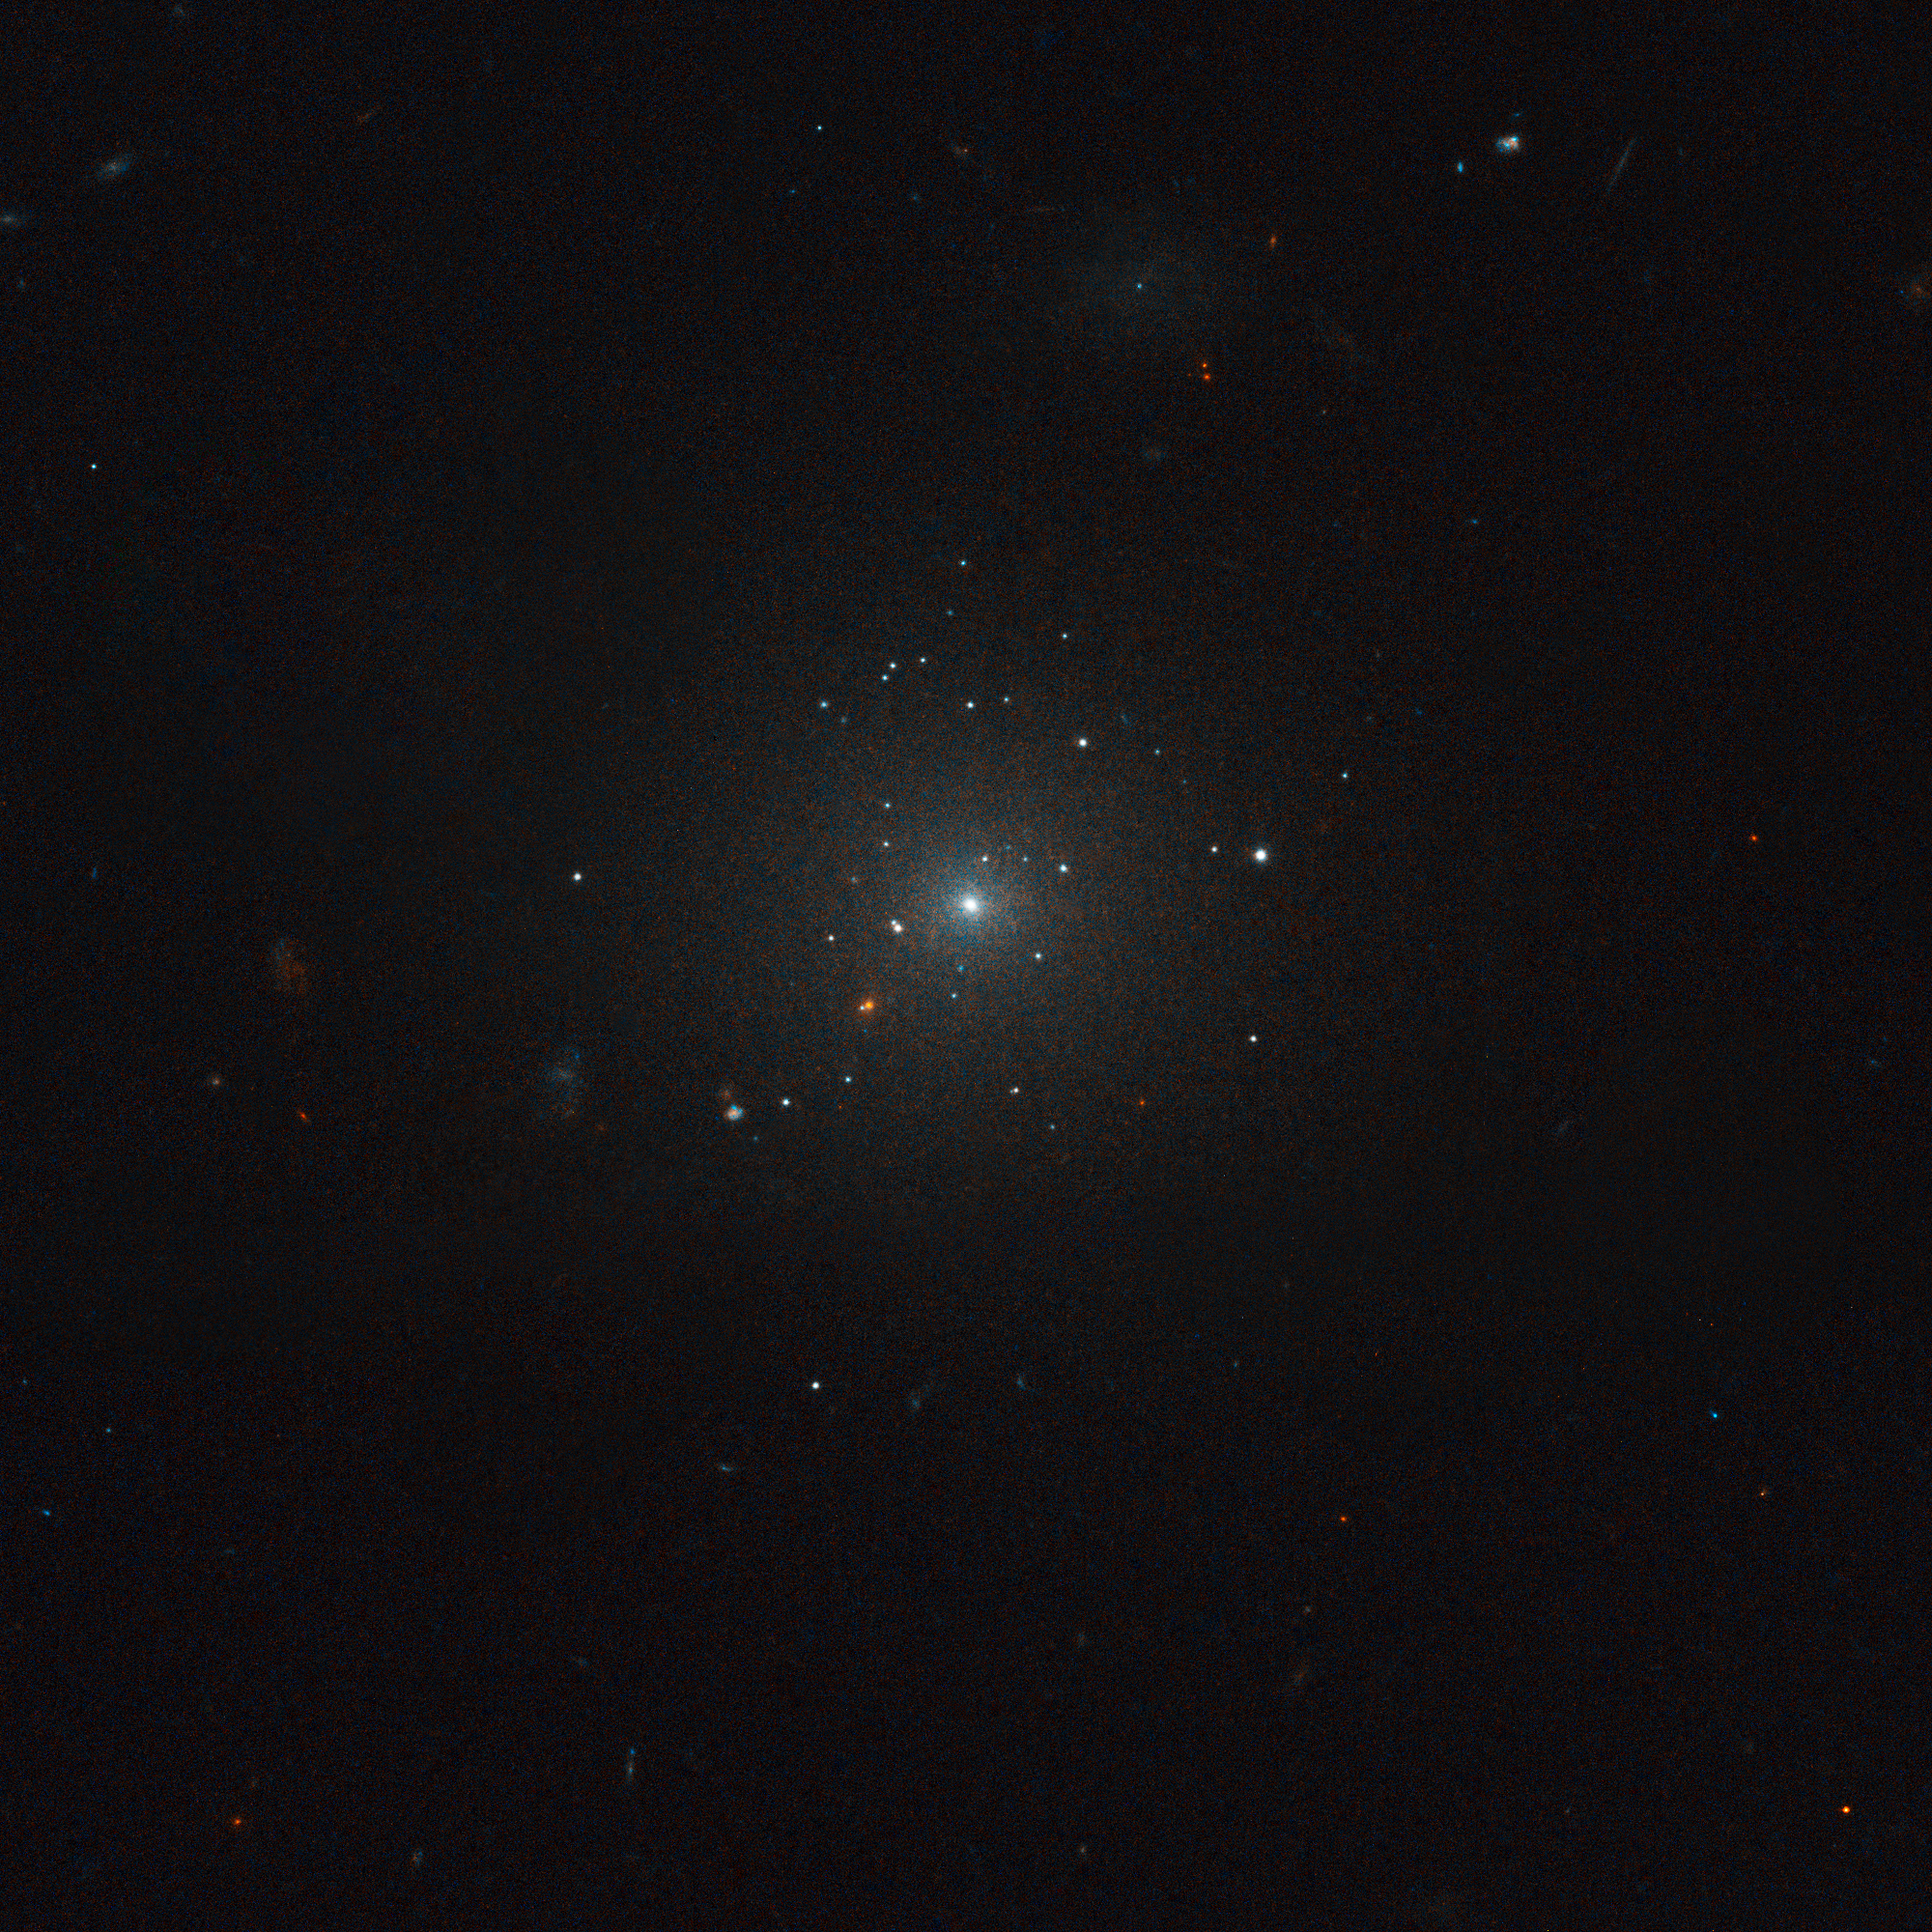

IC 3506 in the Virgo cluster of galaxies

Virgo cluster galaxy IC 3506. Hubble's "eye" is so sharp that it was able to pick out the fuzzy globular clusters, which, at that distance, look like individual stars bunched up around the galaxies, instead of groupings of stars.

Credit: ESA, NASA and E. Peng (Peking University, Beijing)